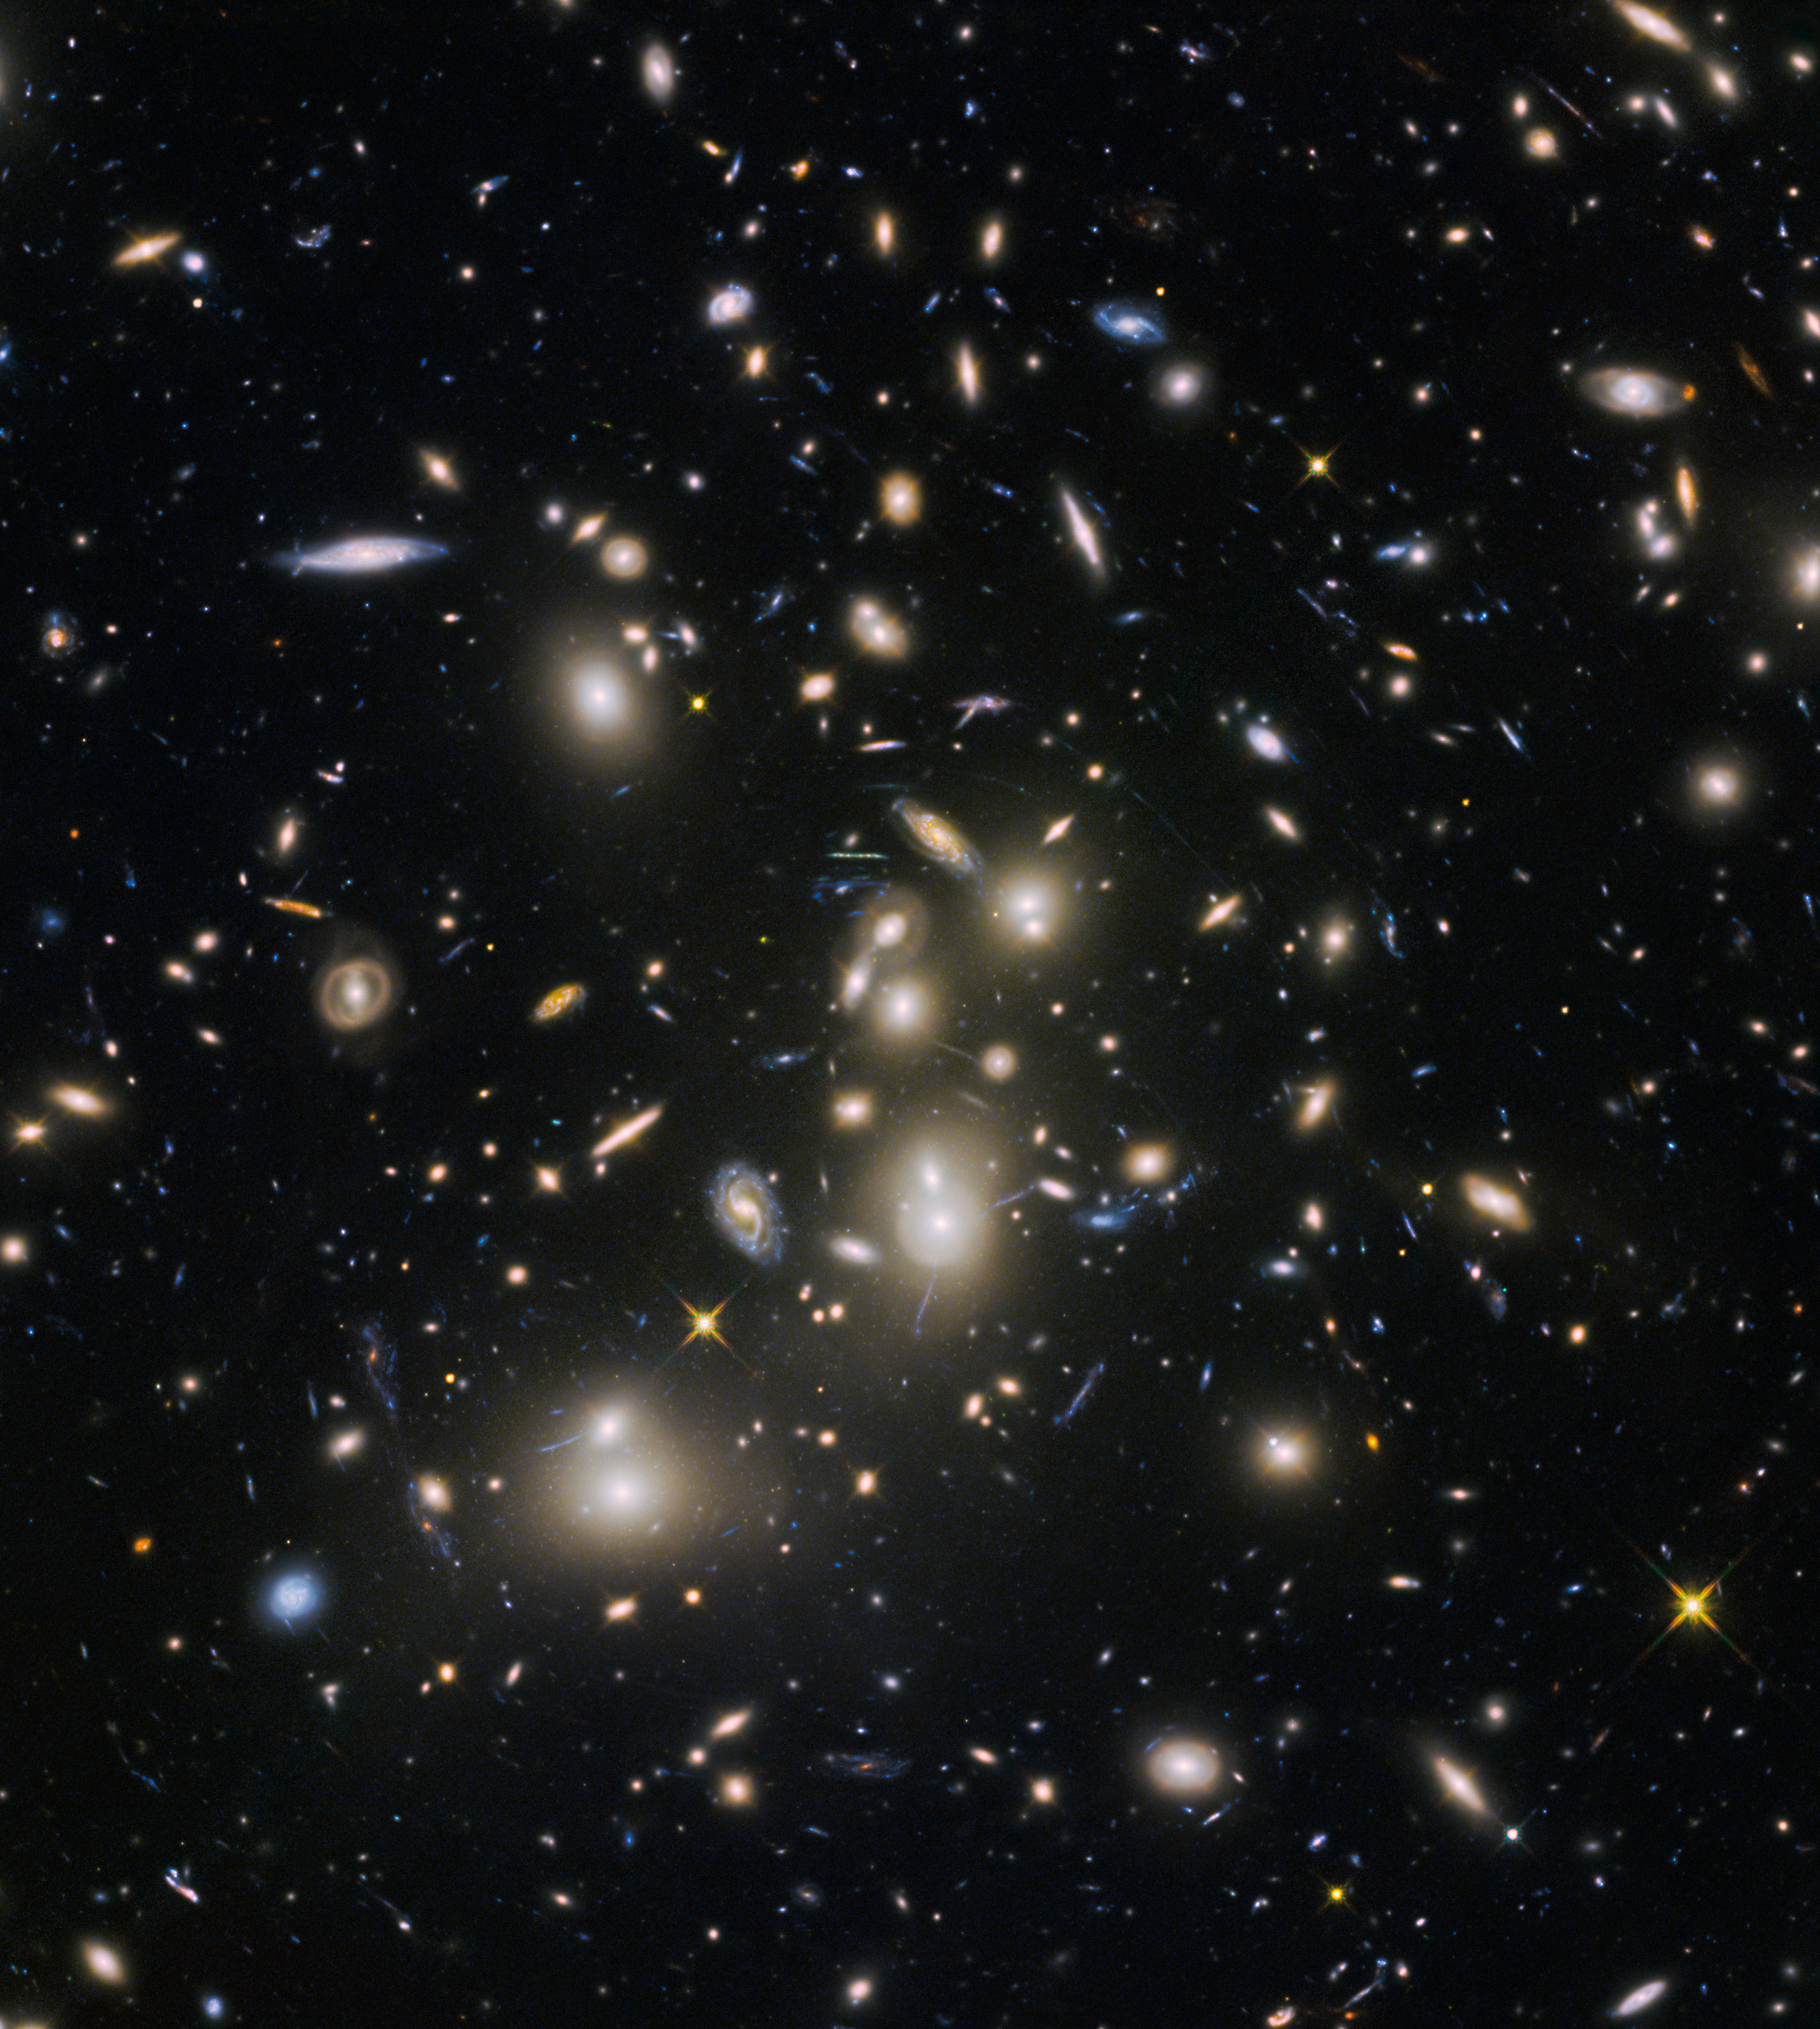

Hubble Frontier Fields view of Abell 2744

Abell 2744, nicknamed Pandora’s Cluster, was the first of six targets within the Frontier Fields programme, which together have produced the deepest images of gravitational lensing ever made. The cluster is thought to have a very violent history, having formed from a cosmic pile-up of multiple galaxy clusters.

Credit: NASA, ESA and the HST Frontier Fields team (STScI)